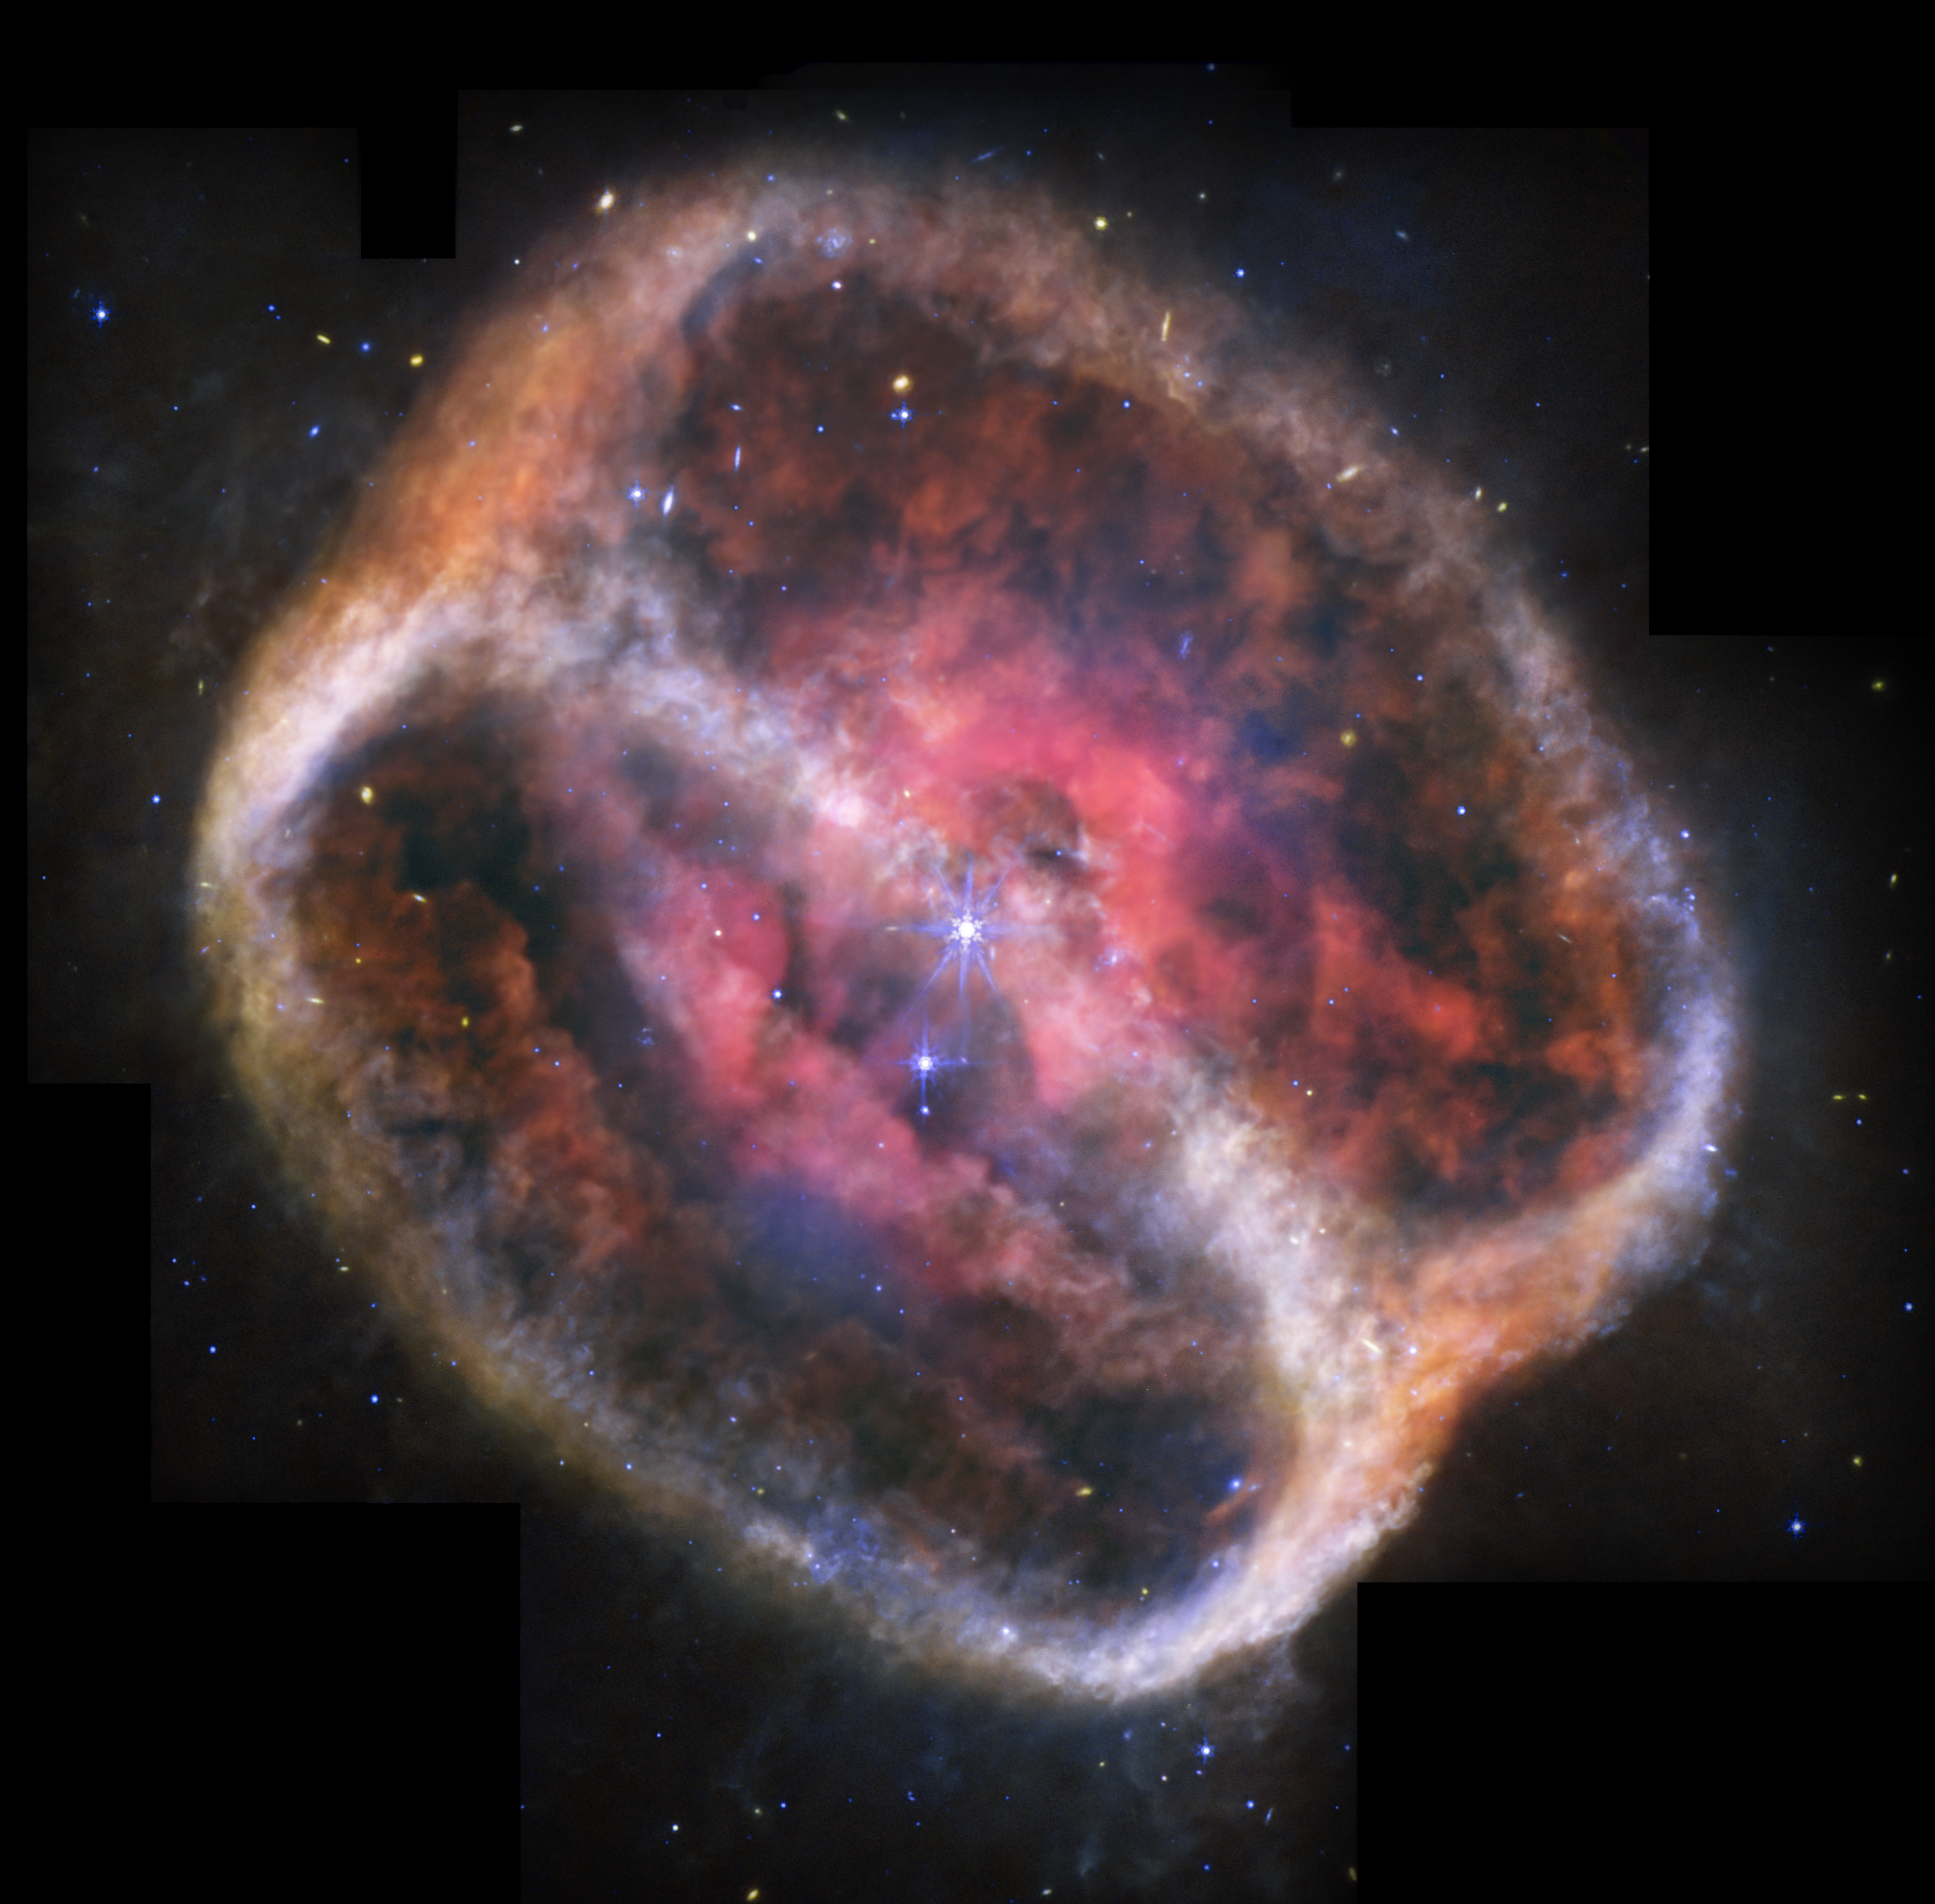

Planetary Nebula NGC 1514 (MIRI image)

The NASA/ESA/CSA James Webb Space Telescope has taken the most detailed image of planetary nebula NGC 1514 to date thanks to its unique mid-infrared observations. Webb shows its rings as “fuzzy,” intricate clumps of dust. It’s also easier to see holes punched through the bright pink central region.

Credit: NASA, ESA, CSA, STScI, Michael Ressler (NASA-JPL), Dave Jones (IAC)